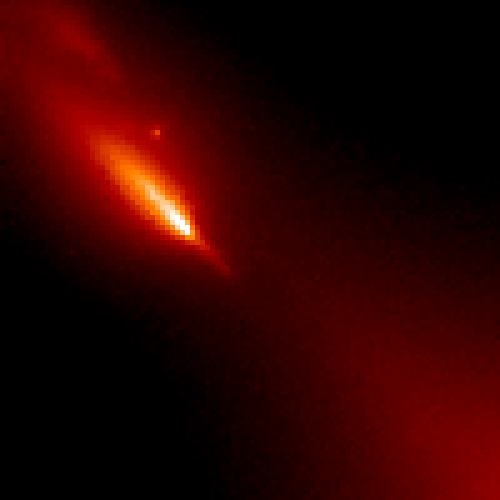

Inner Region of Comet Hyakutake

This image shows pieces of the nucleus that apparently broke off and1 were first detected during ground-based observations on March 24.

Credit: H. A. Weaver (Applied Research Corp.), HST Comet Hyakutake Observing Team, and NASA/ESA